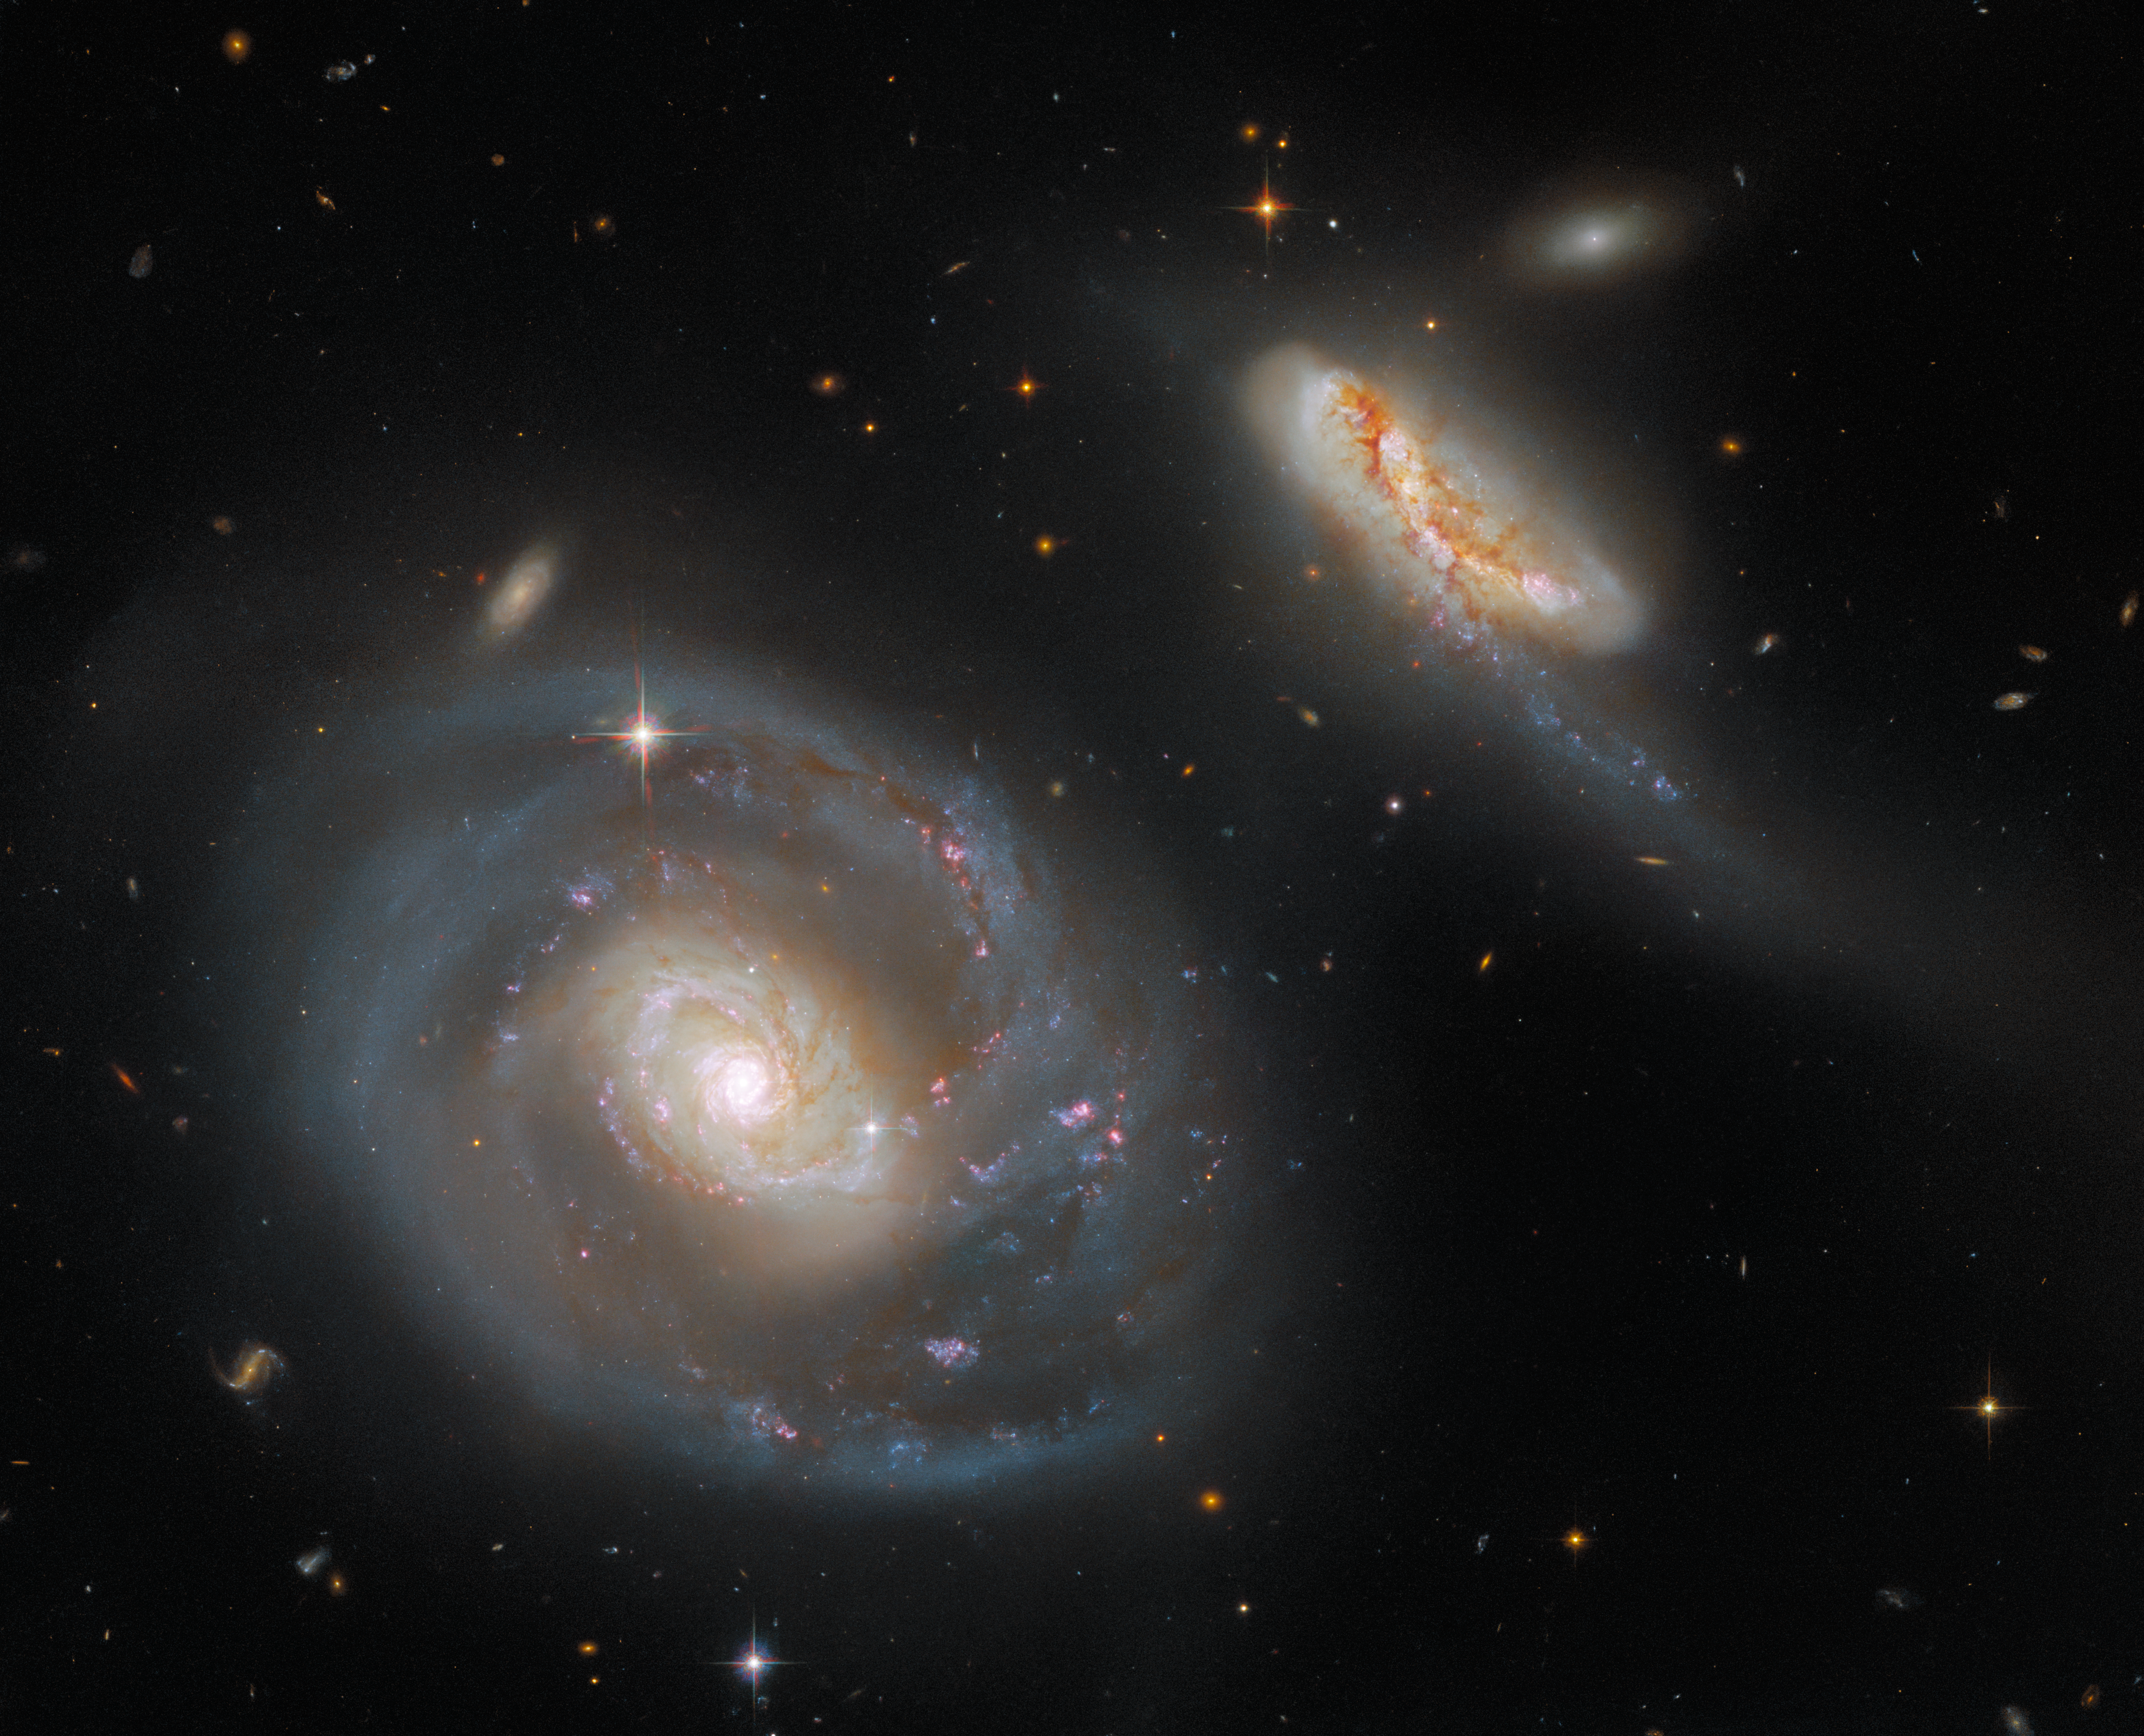

Hubble Captures a Peculiar Galactic Pair

This striking image from the NASA/ESA Hubble Space Telescope showcases Arp 298, a stunning pair of interacting galaxies. Arp 298 — which comprises the two galaxies NGC 7469 and IC 5283 — lies roughly 200 million light-years from Earth in the constellation Pegasus. The larger of the two galaxies pictured here is the barred spiral galaxy NGC 7469, and IC 5283 is its diminutive companion. NGC 7469 is also host to an active, supermassive black hole and a bright ring of star clusters.

The “Arp” in this galaxy pair’s name signifies that they are listed in the Atlas of Peculiar Galaxies compiled by the astronomer Halton Arp. The Atlas of Peculiar Galaxies is a rogues’ gallery of weird and wonderful galaxies containing peculiar structures, featuring galaxies exhibiting everything from segmented spiral arms to concentric rings. This interacting galaxy pair is a familiar sight for Hubble — a portrait of the merging galaxies in Arp 298 was published in 2008.

This image of Arp 298 contains data from three separate Hubble proposals. By combining observations from three proposals, Arp 298 is captured in glorious detail in seven different filters from two of Hubble’s instruments — the Wide Field Camera 3 and the Advanced Camera for Surveys.

The process of planning Hubble observations starts with a proposal — a detailed plan of what an astronomer intends to observe and their scientific motivation for doing so. Once a year, these proposals are gathered and judged in a gruelling review process which assess their scientific merit and feasibility. Fewer than 20% of the proposed observations in any given year will make it through this process and be approved, which makes observing time with Hubble highly prized indeed.

This system will be one of the first galaxies observed with the NASA/ESA/CSA James Webb Space Telescope as part of the Director's Discretionary Early Release Science Programs in Summer 2022.

Credit: ESA/Hubble & NASA, A. Evans, R. Chandar